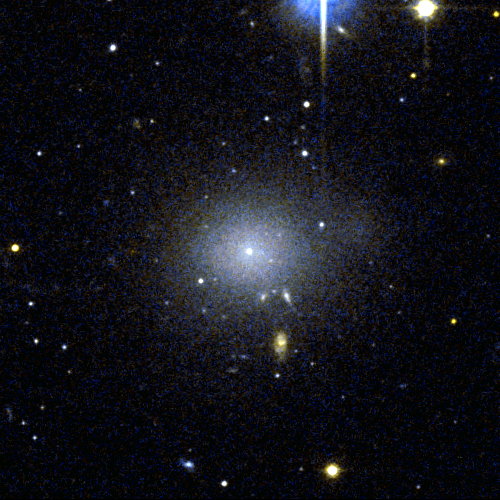

Perseus dwarf galaxy

This object, [CGW2003] J031931.7+4131, is one of four dwarf galaxies that is part of a census of small galaxies in the tumultuous heart of the nearby Perseus galaxy cluster.

The galaxies appear smooth and symmetrical, suggesting that they have not been tidally disrupted by the pull of gravity in the dense cluster environment. Larger galaxies around them, however, are being ripped apart by the gravitational tug of other galaxies.

The image, taken by NASA/ESA’s Hubble Space Telescope in 2005, is an evidence that the undisturbed galaxies are enshrouded by a "cushion" of dark matter, which protects them from their rough-and-tumble neighborhood.

Credit: NASA, ESA and C. Conselice (University of Nottingham, U.K.)